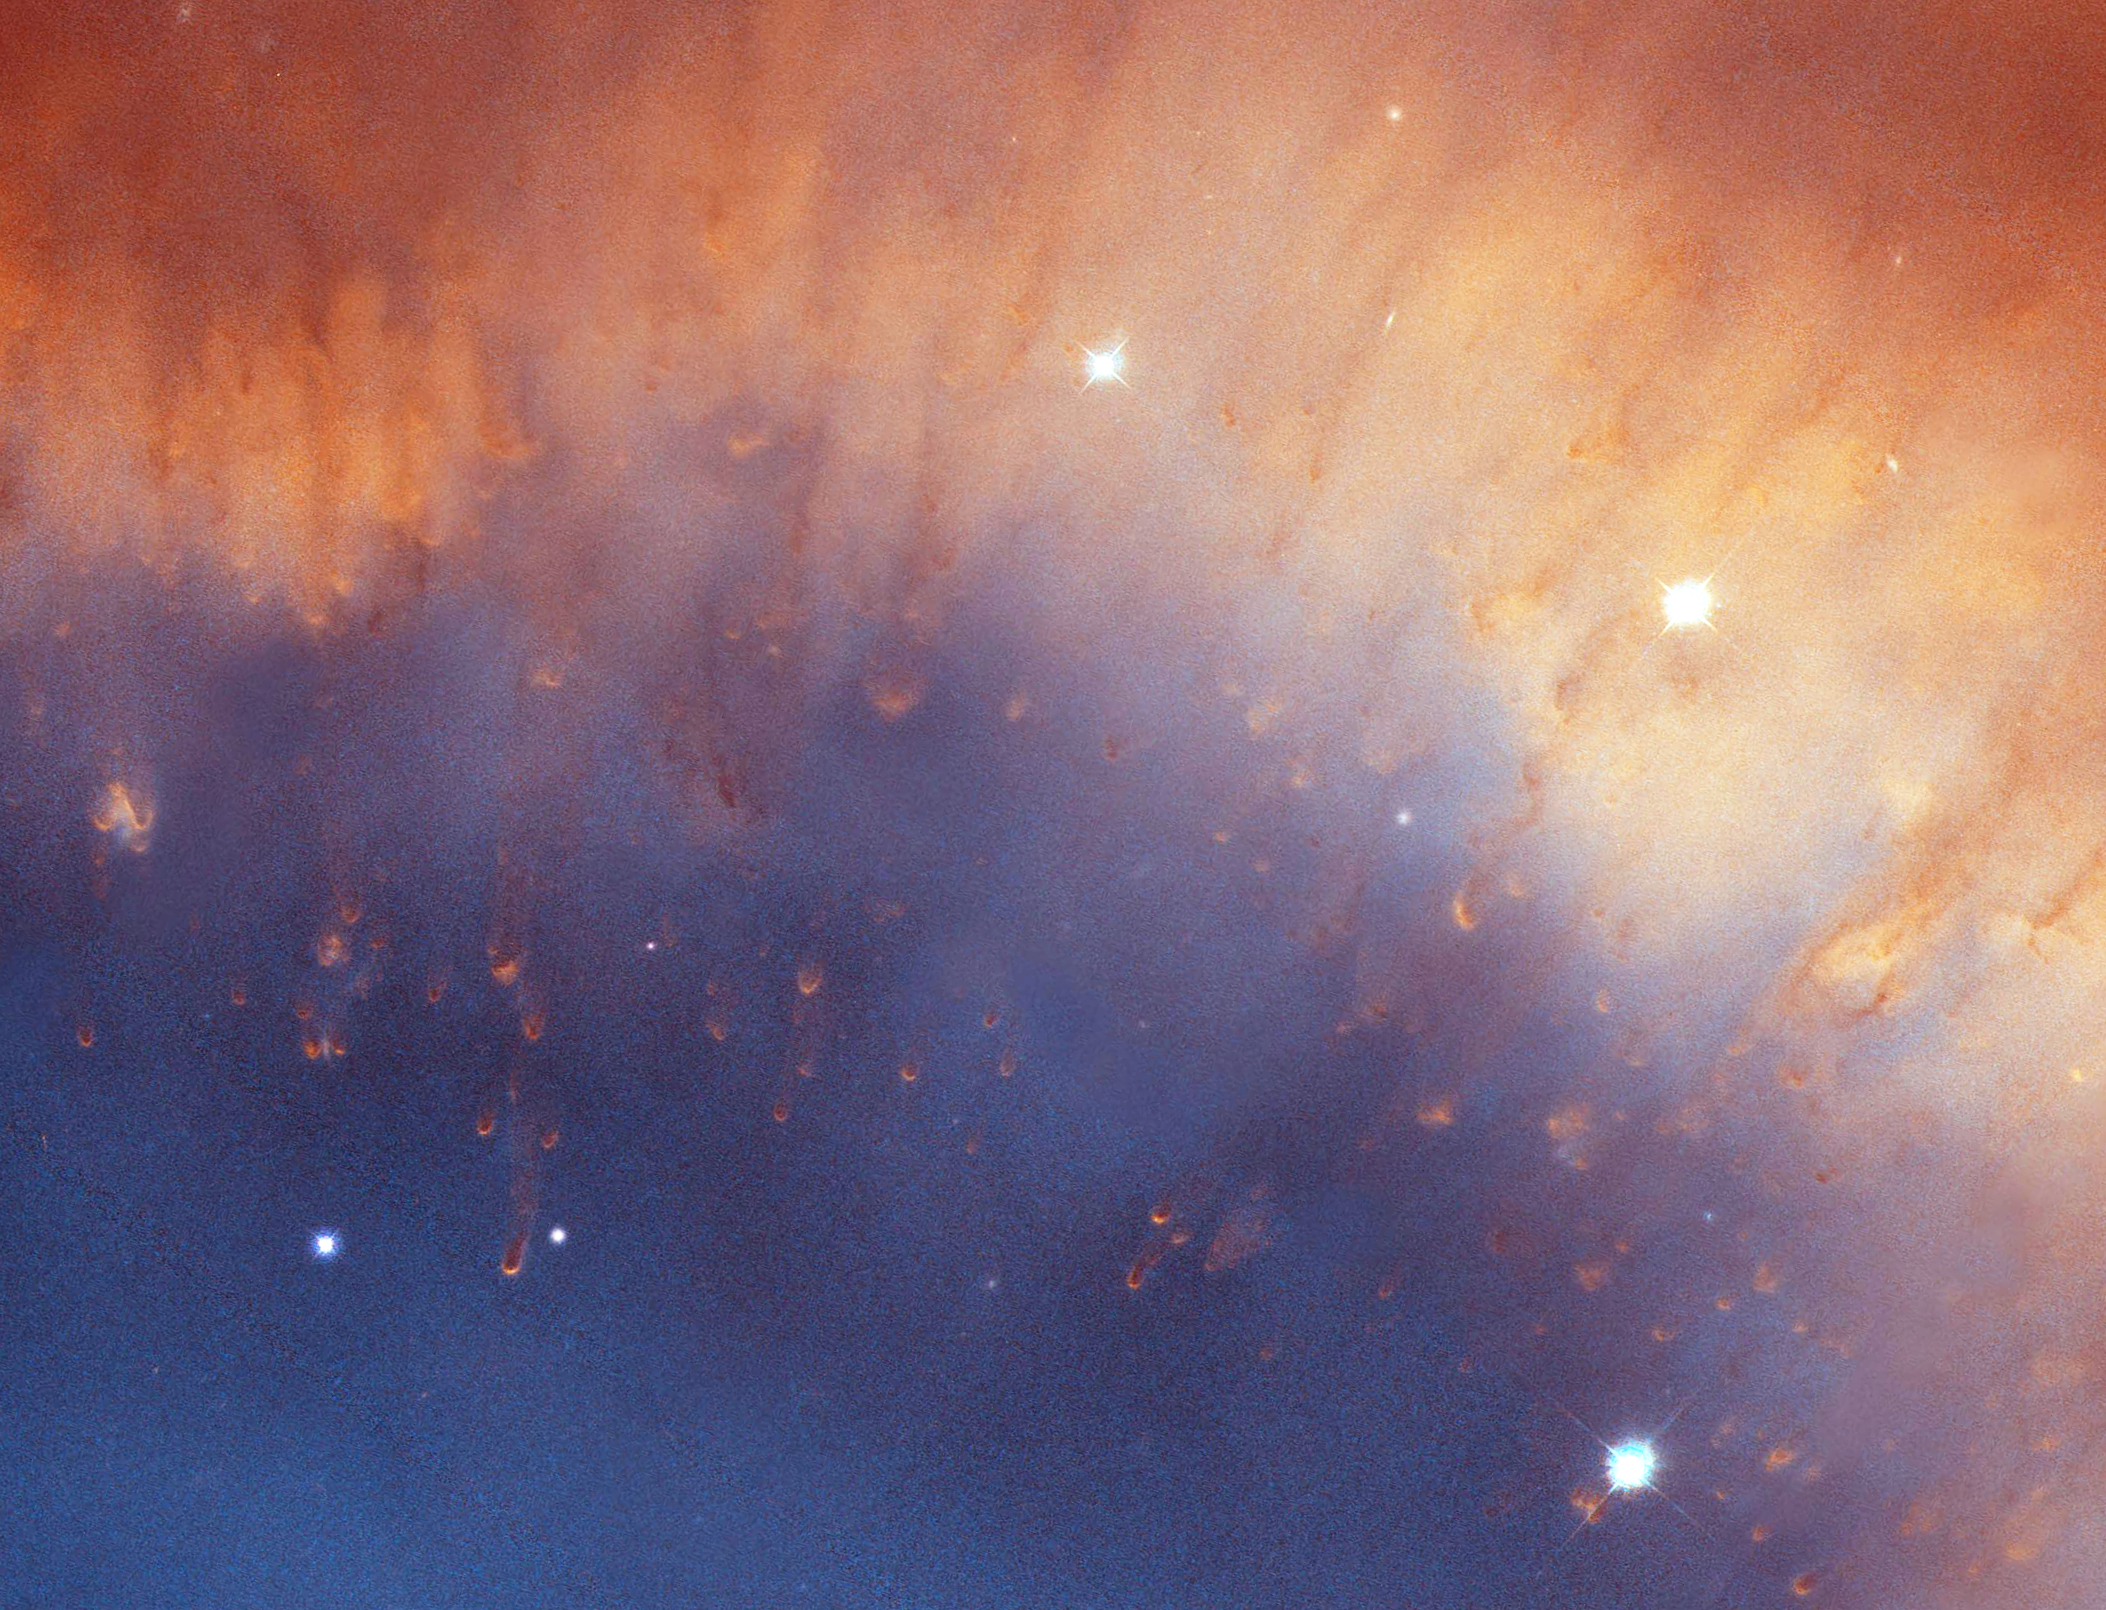

Helix Nebula: Detail Image 2

Detailed image of the Helix Nebula.

Credit: NASA, NOAO, ESA, the Hubble Helix Nebula Team, M. Meixner (STScI), and T.A. Rector (NRAO).